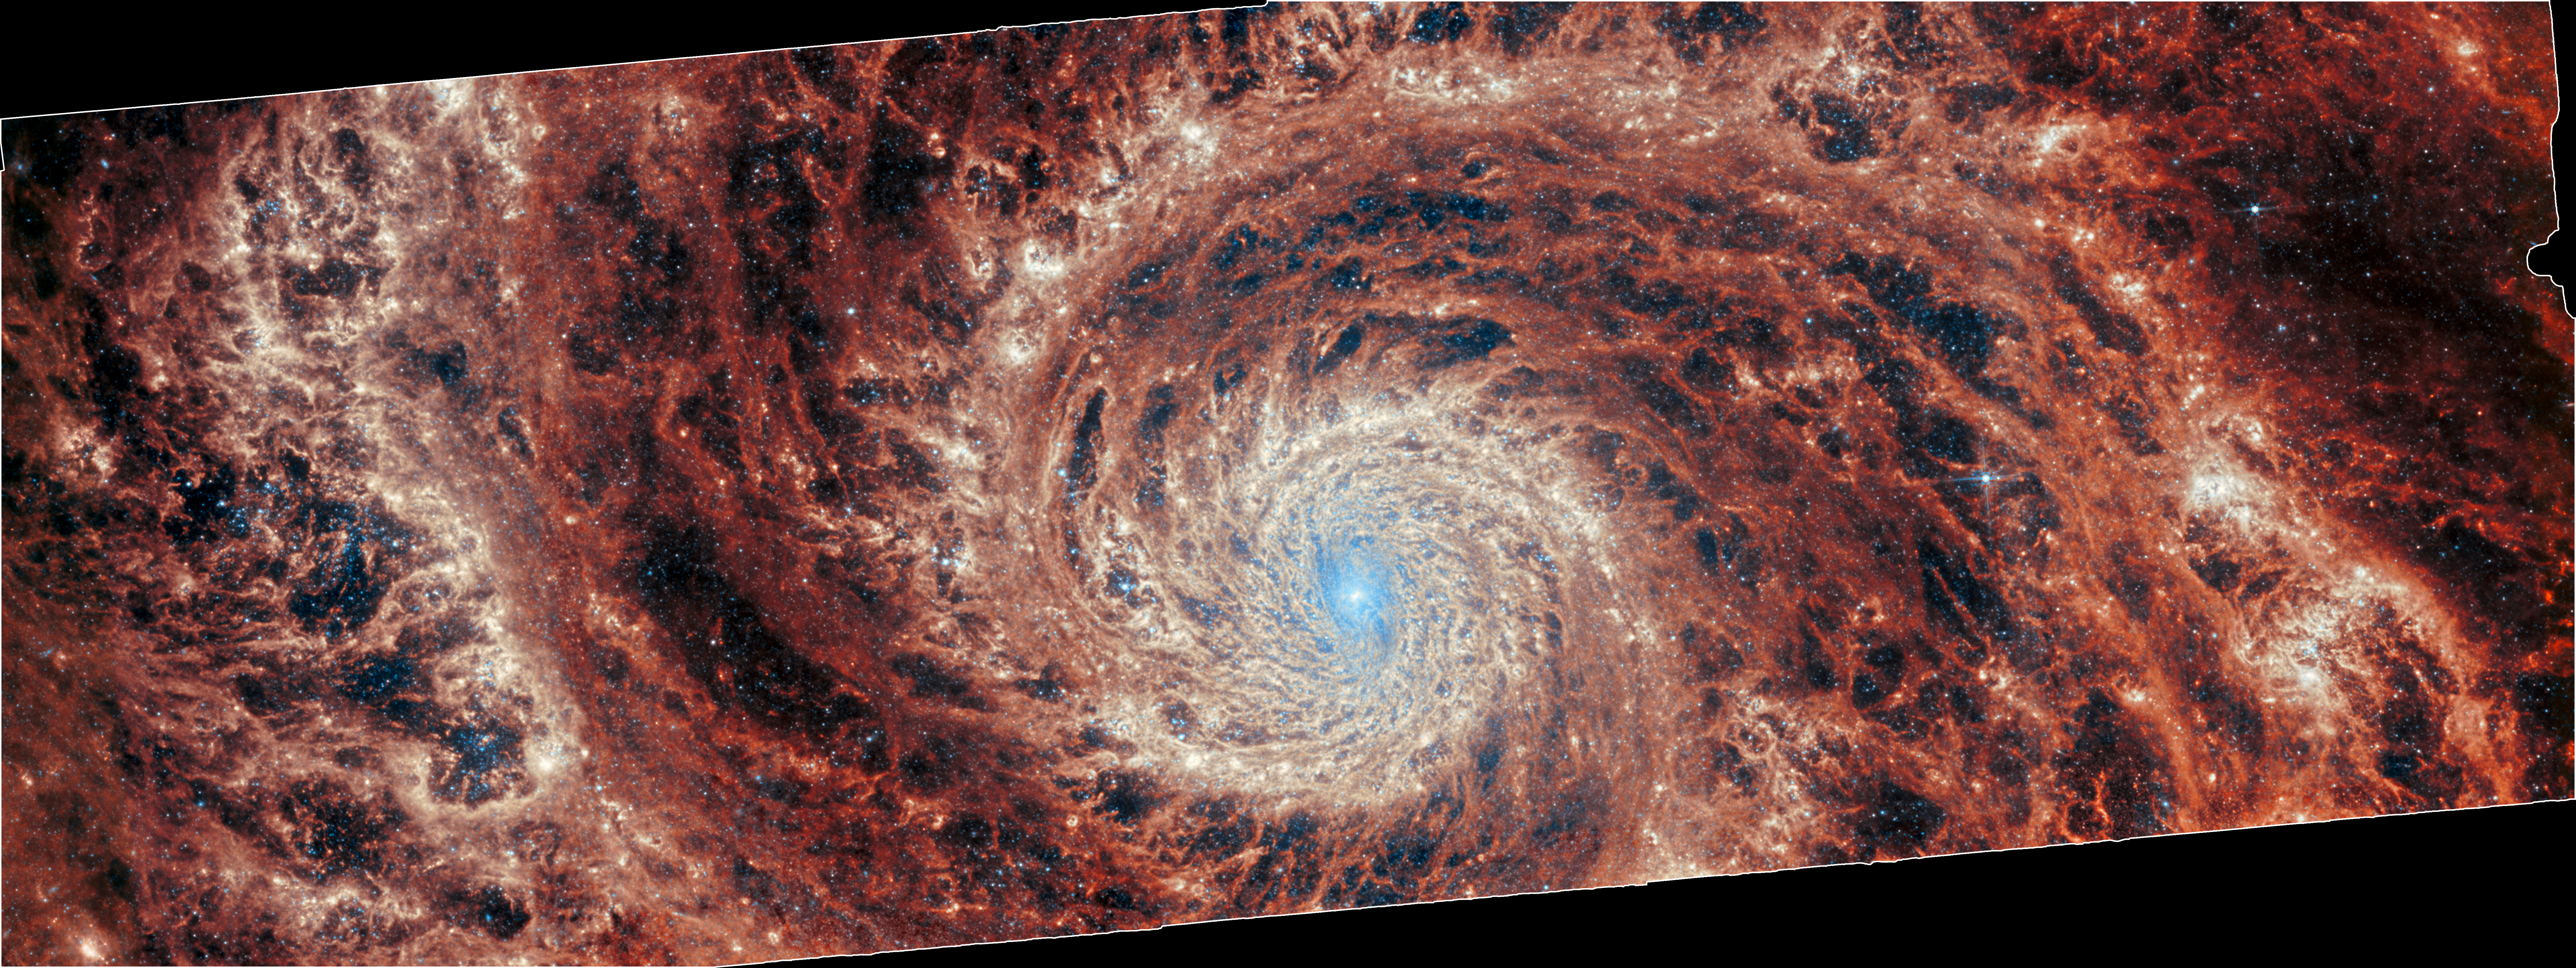

M51 (MIRI image - cropped)

The graceful winding arms of the grand-design spiral galaxy M51 stretch across this image from the NASA/ESA/CSA James Webb Space Telescope. Unlike the menagerie of weird and wonderful spiral galaxies with ragged or disrupted spiral arms, grand-design spiral galaxies boast prominent, well-developed spiral arms like the ones showcased in this image. This galactic portrait was captured by Webb’s Mid-InfraRed Instrument (MIRI).

In this image the reprocessed stellar light by dust grains and molecules in the medium of the galaxy illuminate a dramatic filamentary medium. Empty cavities and bright filaments alternate and give the impression of ripples propagating from the spiral arms. The yellow compact regions indicate the newly formed star clusters in the galaxy.

M51 — also known as NGC 5194 — lies about 27 million light-years away from Earth in the constellation Canes Venatici, and is trapped in a tumultuous relationship with its near neighbour, the dwarf galaxy NGC 5195. The interaction between these two galaxies has made these galactic neighbours one of the better-studied galaxy pairs in the night sky. The gravitational influence of M51’s smaller companion is thought to be partially responsible for the stately nature of the galaxy’s prominent and distinct spiral arms. If you would like to learn more about this squabbling pair of galactic neighbours, you can explore earlier observations of M51 by the NASA/ESA Hubble Space Telescope here.

This Webb observation of M51 is one of a series of observations collectively titled Feedback in Emerging extrAgalactic Star clusTers, or FEAST. The FEAST observations were designed to shed light on the interplay between stellar feedback and star formation in environments outside of our own galaxy, the Milky Way. Stellar feedback is the term used to describe the outpouring of energy from stars into the environments which form them, and is a crucial process in determining the rates at which stars form. Understanding stellar feedback is vital to building accurate universal models of star formation.

The aim of the FEAST observations is to discover and study stellar nurseries in galaxies beyond our own Milky Way. Before Webb became operative, other observatories such as the Atacama Large Millimetre Array in the Chilean desert and Hubble have given us a glimpse of star formation either at the onset (tracing the dense gas and dust clouds where stars will form) or after the stars have destroyed with their energy their natal gas and dust clouds. Webb is opening a new window into the early stages of star formation and stellar light, as well as the energy reprocessing of gas and dust. Scientists are seeing star clusters emerging from their natal cloud in galaxies beyond our local group for the first time. They will also be able to measure how long it takes for these stars to pollute with newly formed metals and to clean out the gas (these time scales are different from galaxy to galaxy). By studying these processes, we will better understand how the star formation cycle and metal enrichment are regulated within galaxies as well as what are the time scales for planets and brown dwarfs to form. Once dust and gas is removed from the newly formed stars, there is no material left to form planets.

Note: The black region visible around this image is due to the rotation and cropping of the image to align with the NIRCam image for the slider tool. The full MIRI image can be viewed here.

Credit: ESA/Webb, NASA & CSA, A. Adamo (Stockholm University) and the FEAST JWST team